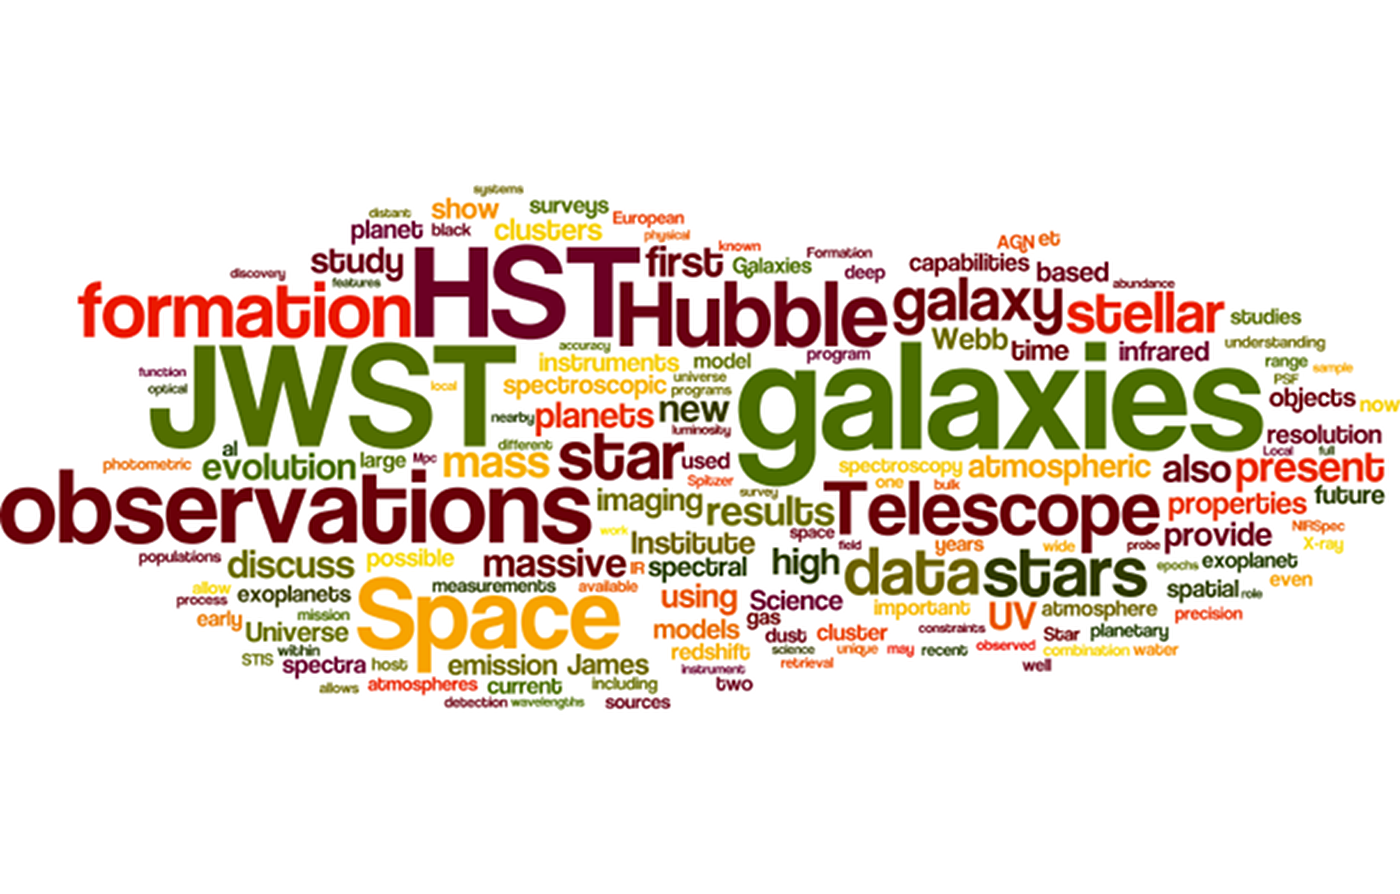

Hubble wordle

A wordle created by Danny Lennon (ESA), who offered the final remarks at the end of the conference Science with the Hubble and James Webb Space Telescopes V.

Credit: ESA/Hubble, D. Lennon